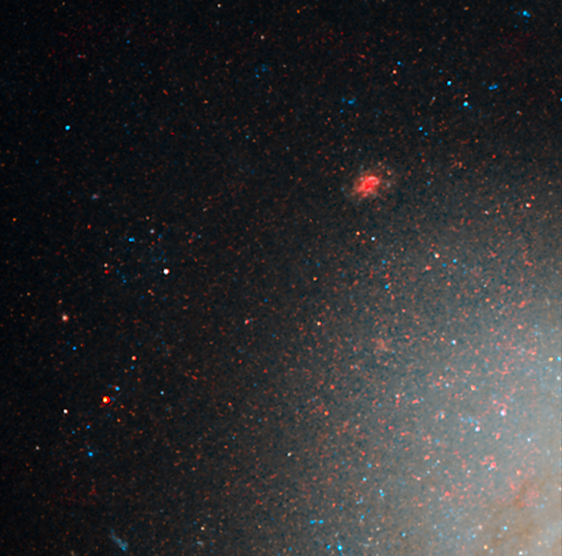

NGC 3021 NICMOS/ACS detail 1

This image is part of a montage of images of the spiral galaxy NGC 3021 taken by the NASA/ESA Hubble Space Telescope. Hubble made precise measurements of Cepheid variable stars in the galaxy, highlighted in this image. These stars pulsate at a rate that is matched closely to their intrinsic brightness. This makes them ideal for measuring intergalactic distances. The Cepheids are used to calibrate an even brighter milepost marker that can be used over greater distances, a Type Ia supernova. The supernova was observed in the galaxy in 1995. The image was taken with the Near Infrared Camera and Multi-Object Spectrometer (NICMOS).

Credit: NASA, ESA and A. Riess (STScI/JHU)